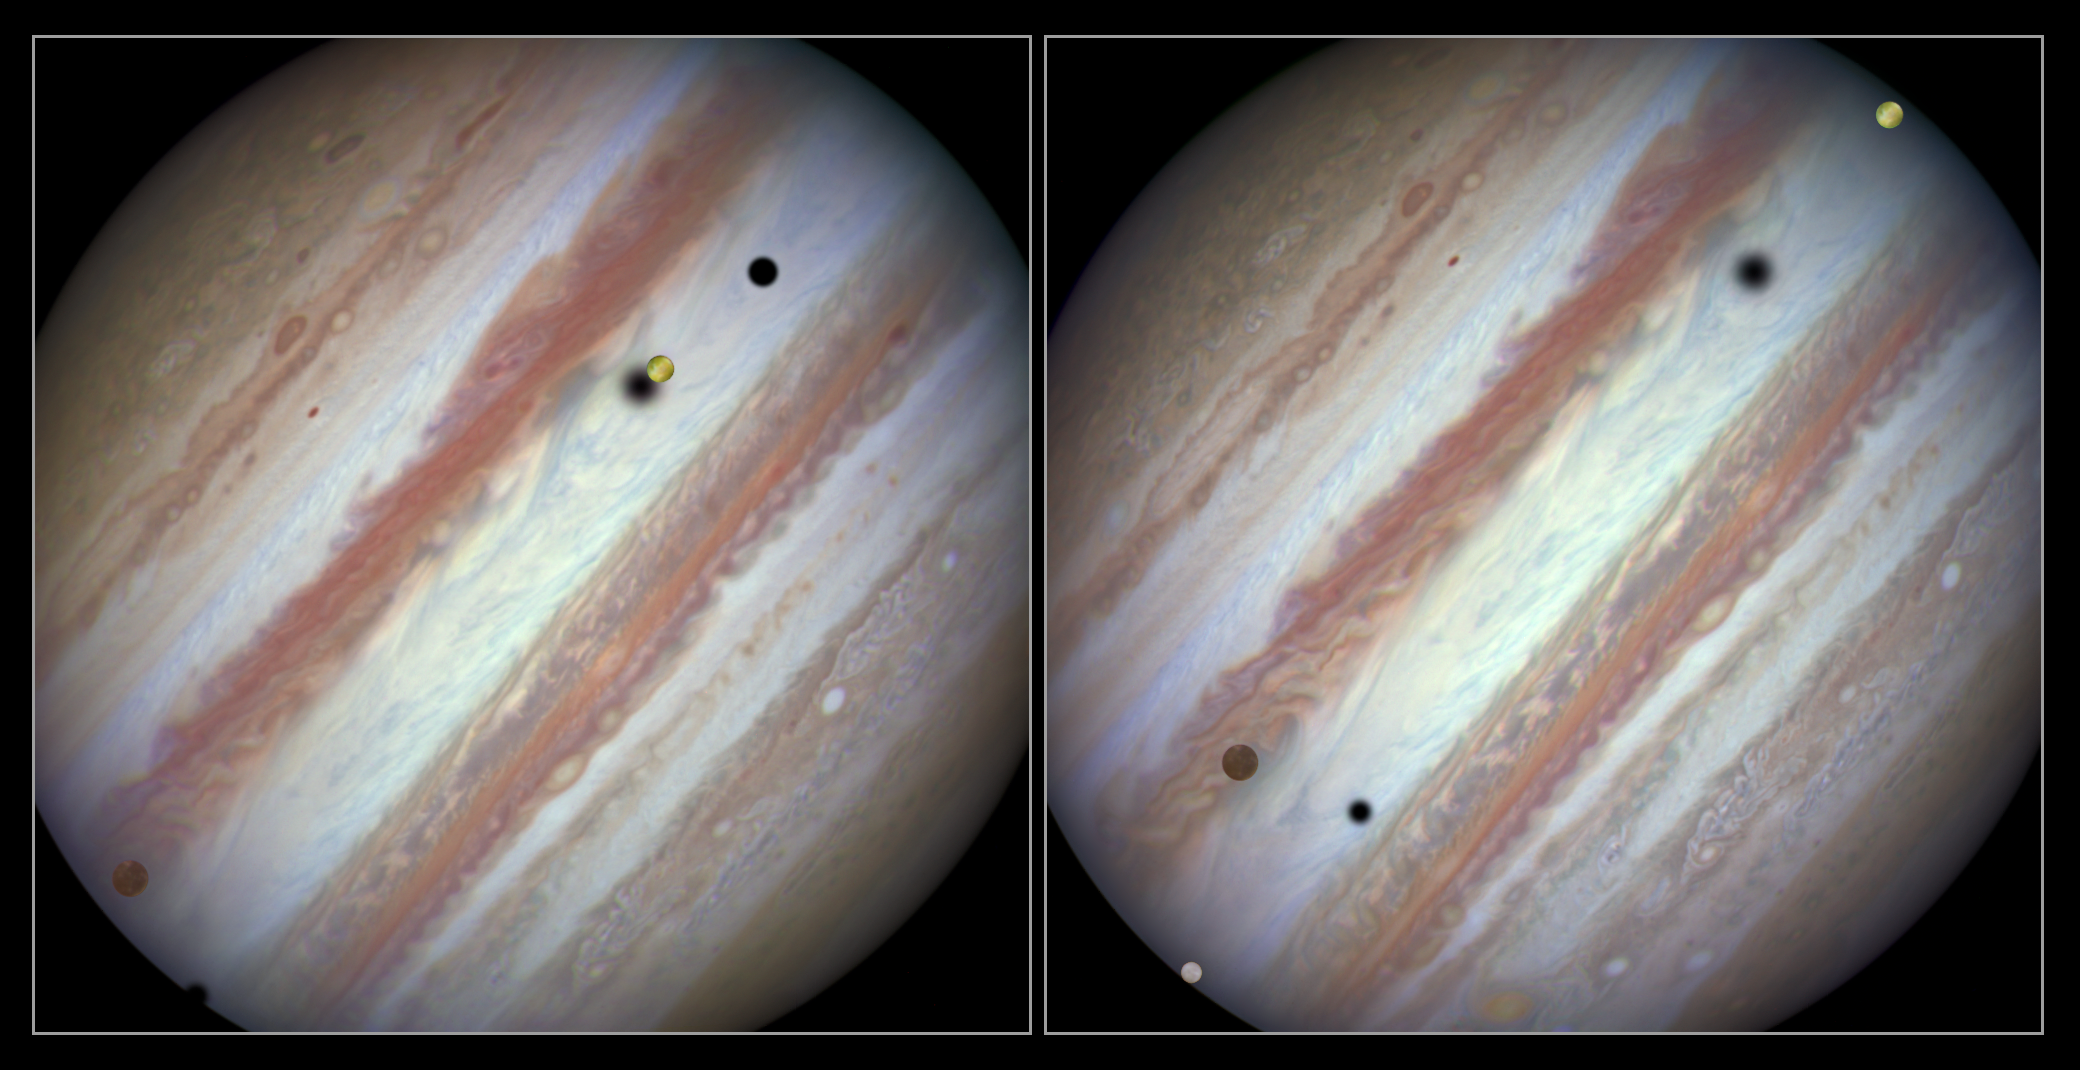

Three moons and their shadows parade across Jupiter — comparison of beginning and end of sequence, without annotations

These new NASA/ESA Hubble Space Telescope images capture a rare occurrence as three of Jupiter’s largest moons parade across the giant gas planet’s banded face.

The image on the left shows the Hubble observation at the beginning of the event. On the left is the moon Callisto and on the right, Io. The shadows from Europa, which cannot be seen in the image, Callisto, and Io are strung out from left to right.

The image on the right shows the end of the event, approximately 42 minutes later. Europa has entered the frame at lower left with slower moving Callisto above and to the right of it. Meanwhile Io — which orbits significantly closer to Jupiter and so appears to move much more quickly — is approaching the eastern limb of the planet. Whilst Callisto’s shadow seems hardly to have moved Io’s has set over the planet’s eastern edge and Europa’s has risen further in the west.

The movement of the moons is shown in the video created from Hubble stills and an annotated version is also available.

Credit: NASA, ESA, Hubble Heritage Team